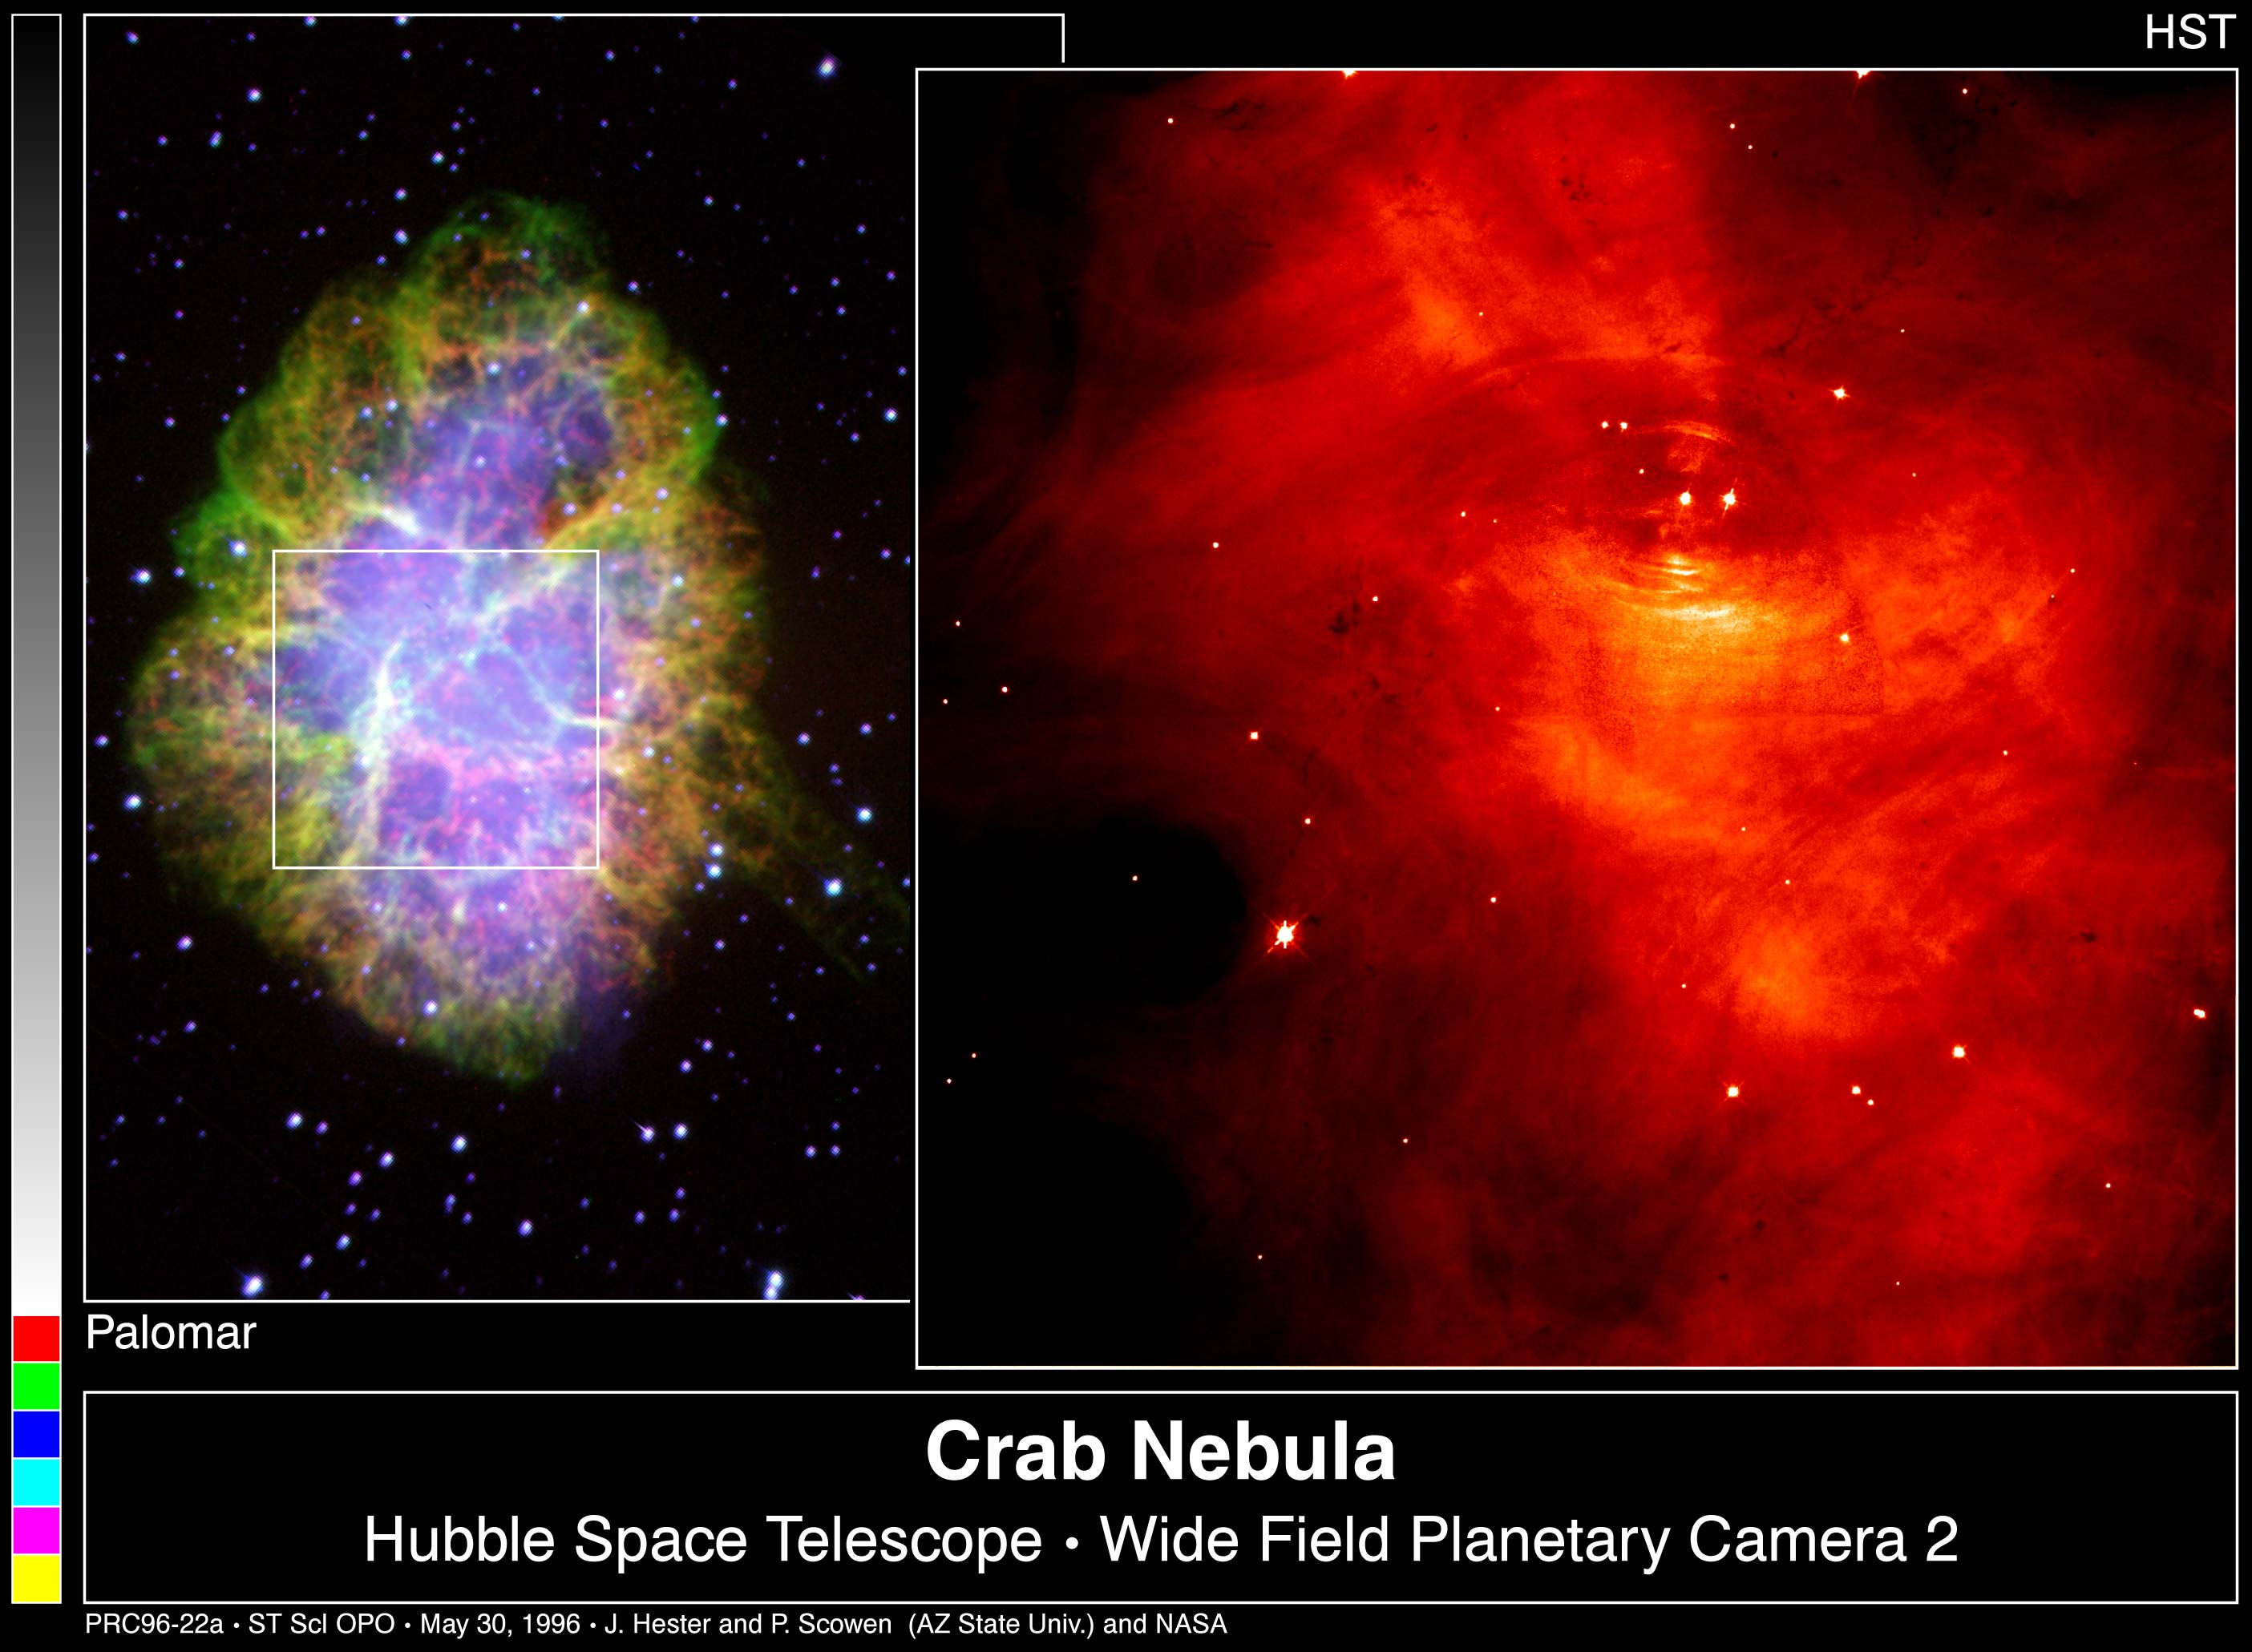

The Crab Nebula

Left Image

Ths colorful photo shows a ground-based image of the entire Crab Nebula, the remnant of a supernova explosion witnessed over 900 years ago.

Right Image

This picture shows a Hubble Space Telescope image of the inner parts of the Crab. The pulsar itself is visible as the left of the pair of stars near the center of the frame.

Credit: Jeff Hester and Paul Scowen (Arizona State University), and NASA/ESA